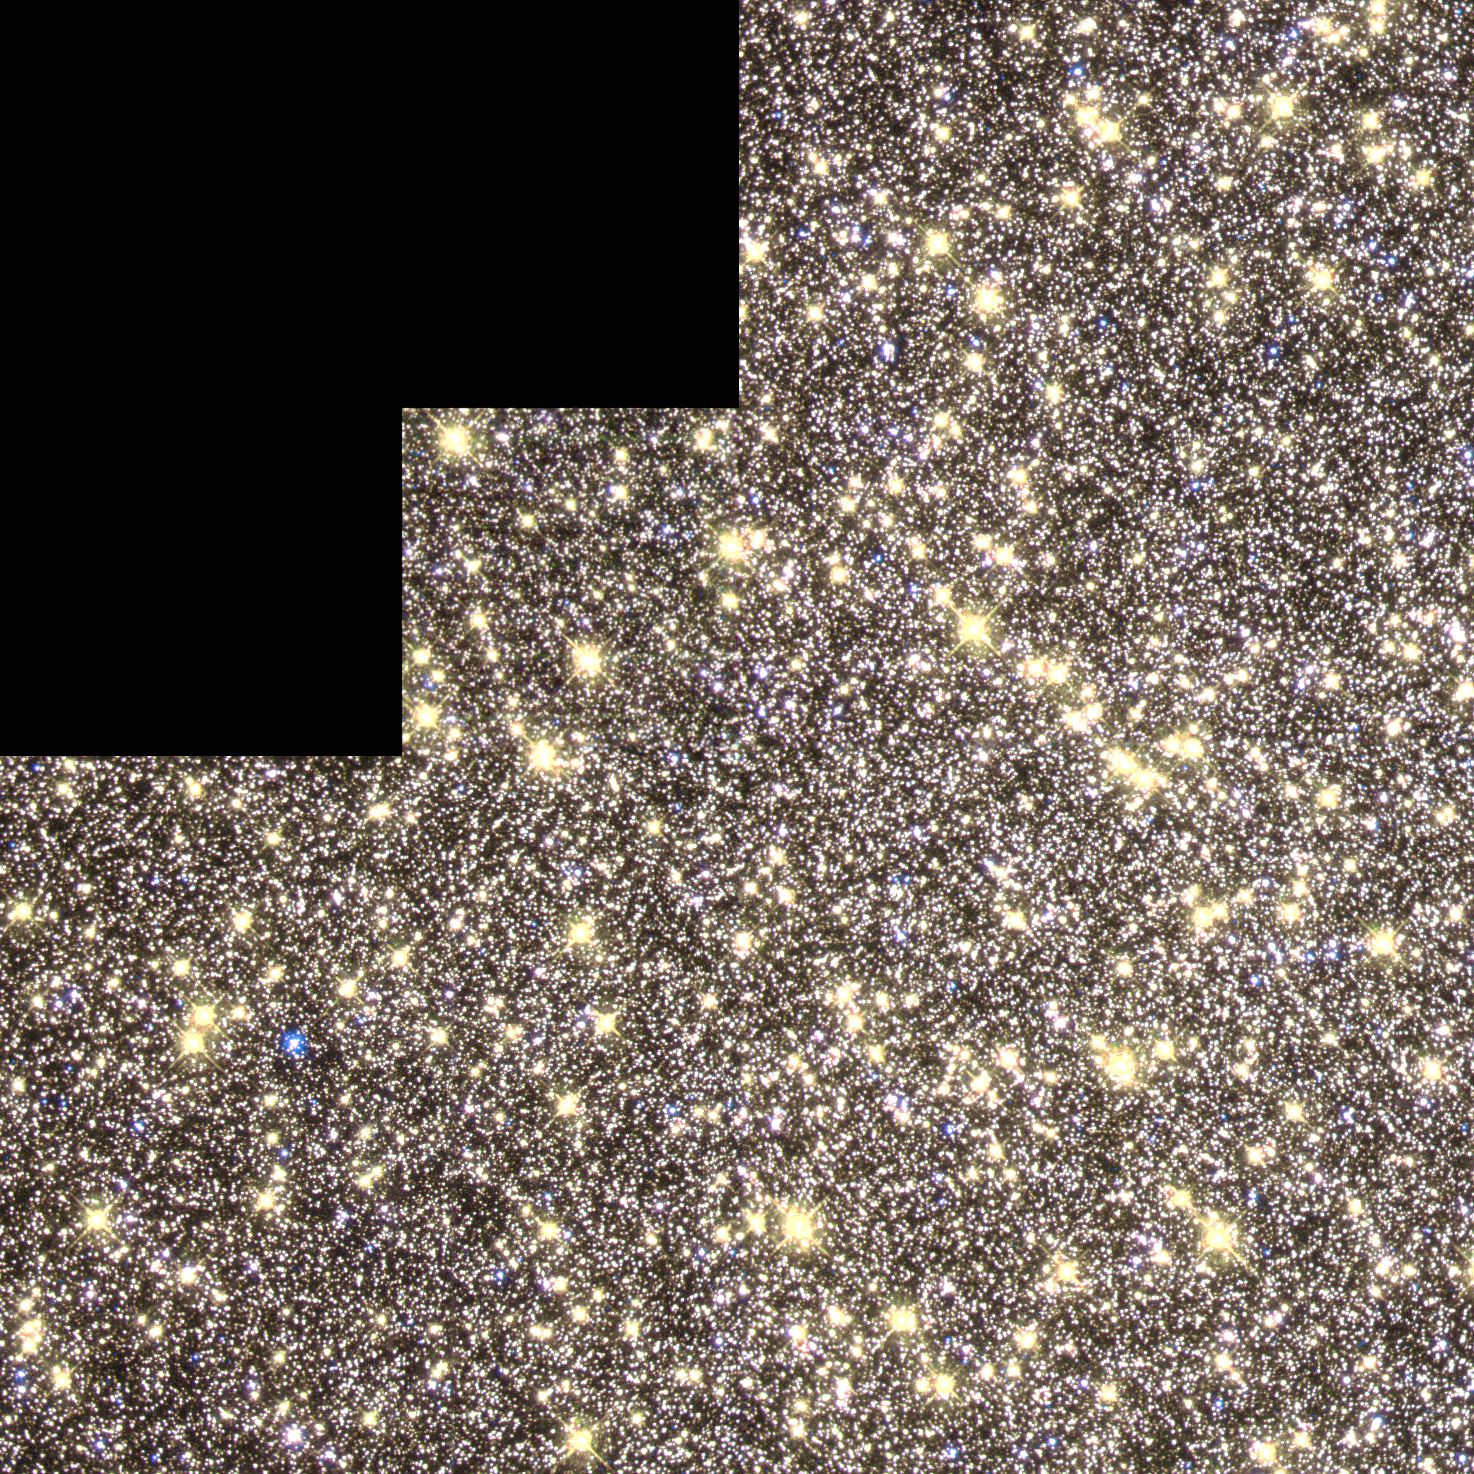

Peering into the Core of a Globular Cluster

Astronomers have used NASA/ESA Hubble Space Telescope to peer into the centre of a dense swarm of stars called Omega Centauri. Located some 17, 000 light-years from Earth, Omega Centauri is a massive globular star cluster, containing several million stars swirling in locked orbits around a common centre of gravity. The stars are packed so densely in the cluster's core that it is difficult for ground-based telescopes to make out individual stars. Hubble's high resolution is able to pick up where ground-based telescopes leave off, capturing distinct points of light from stars at the very centre of the cluster.

Credit: NASA/ESA and The Hubble Heritage Team (STScI/AURA)